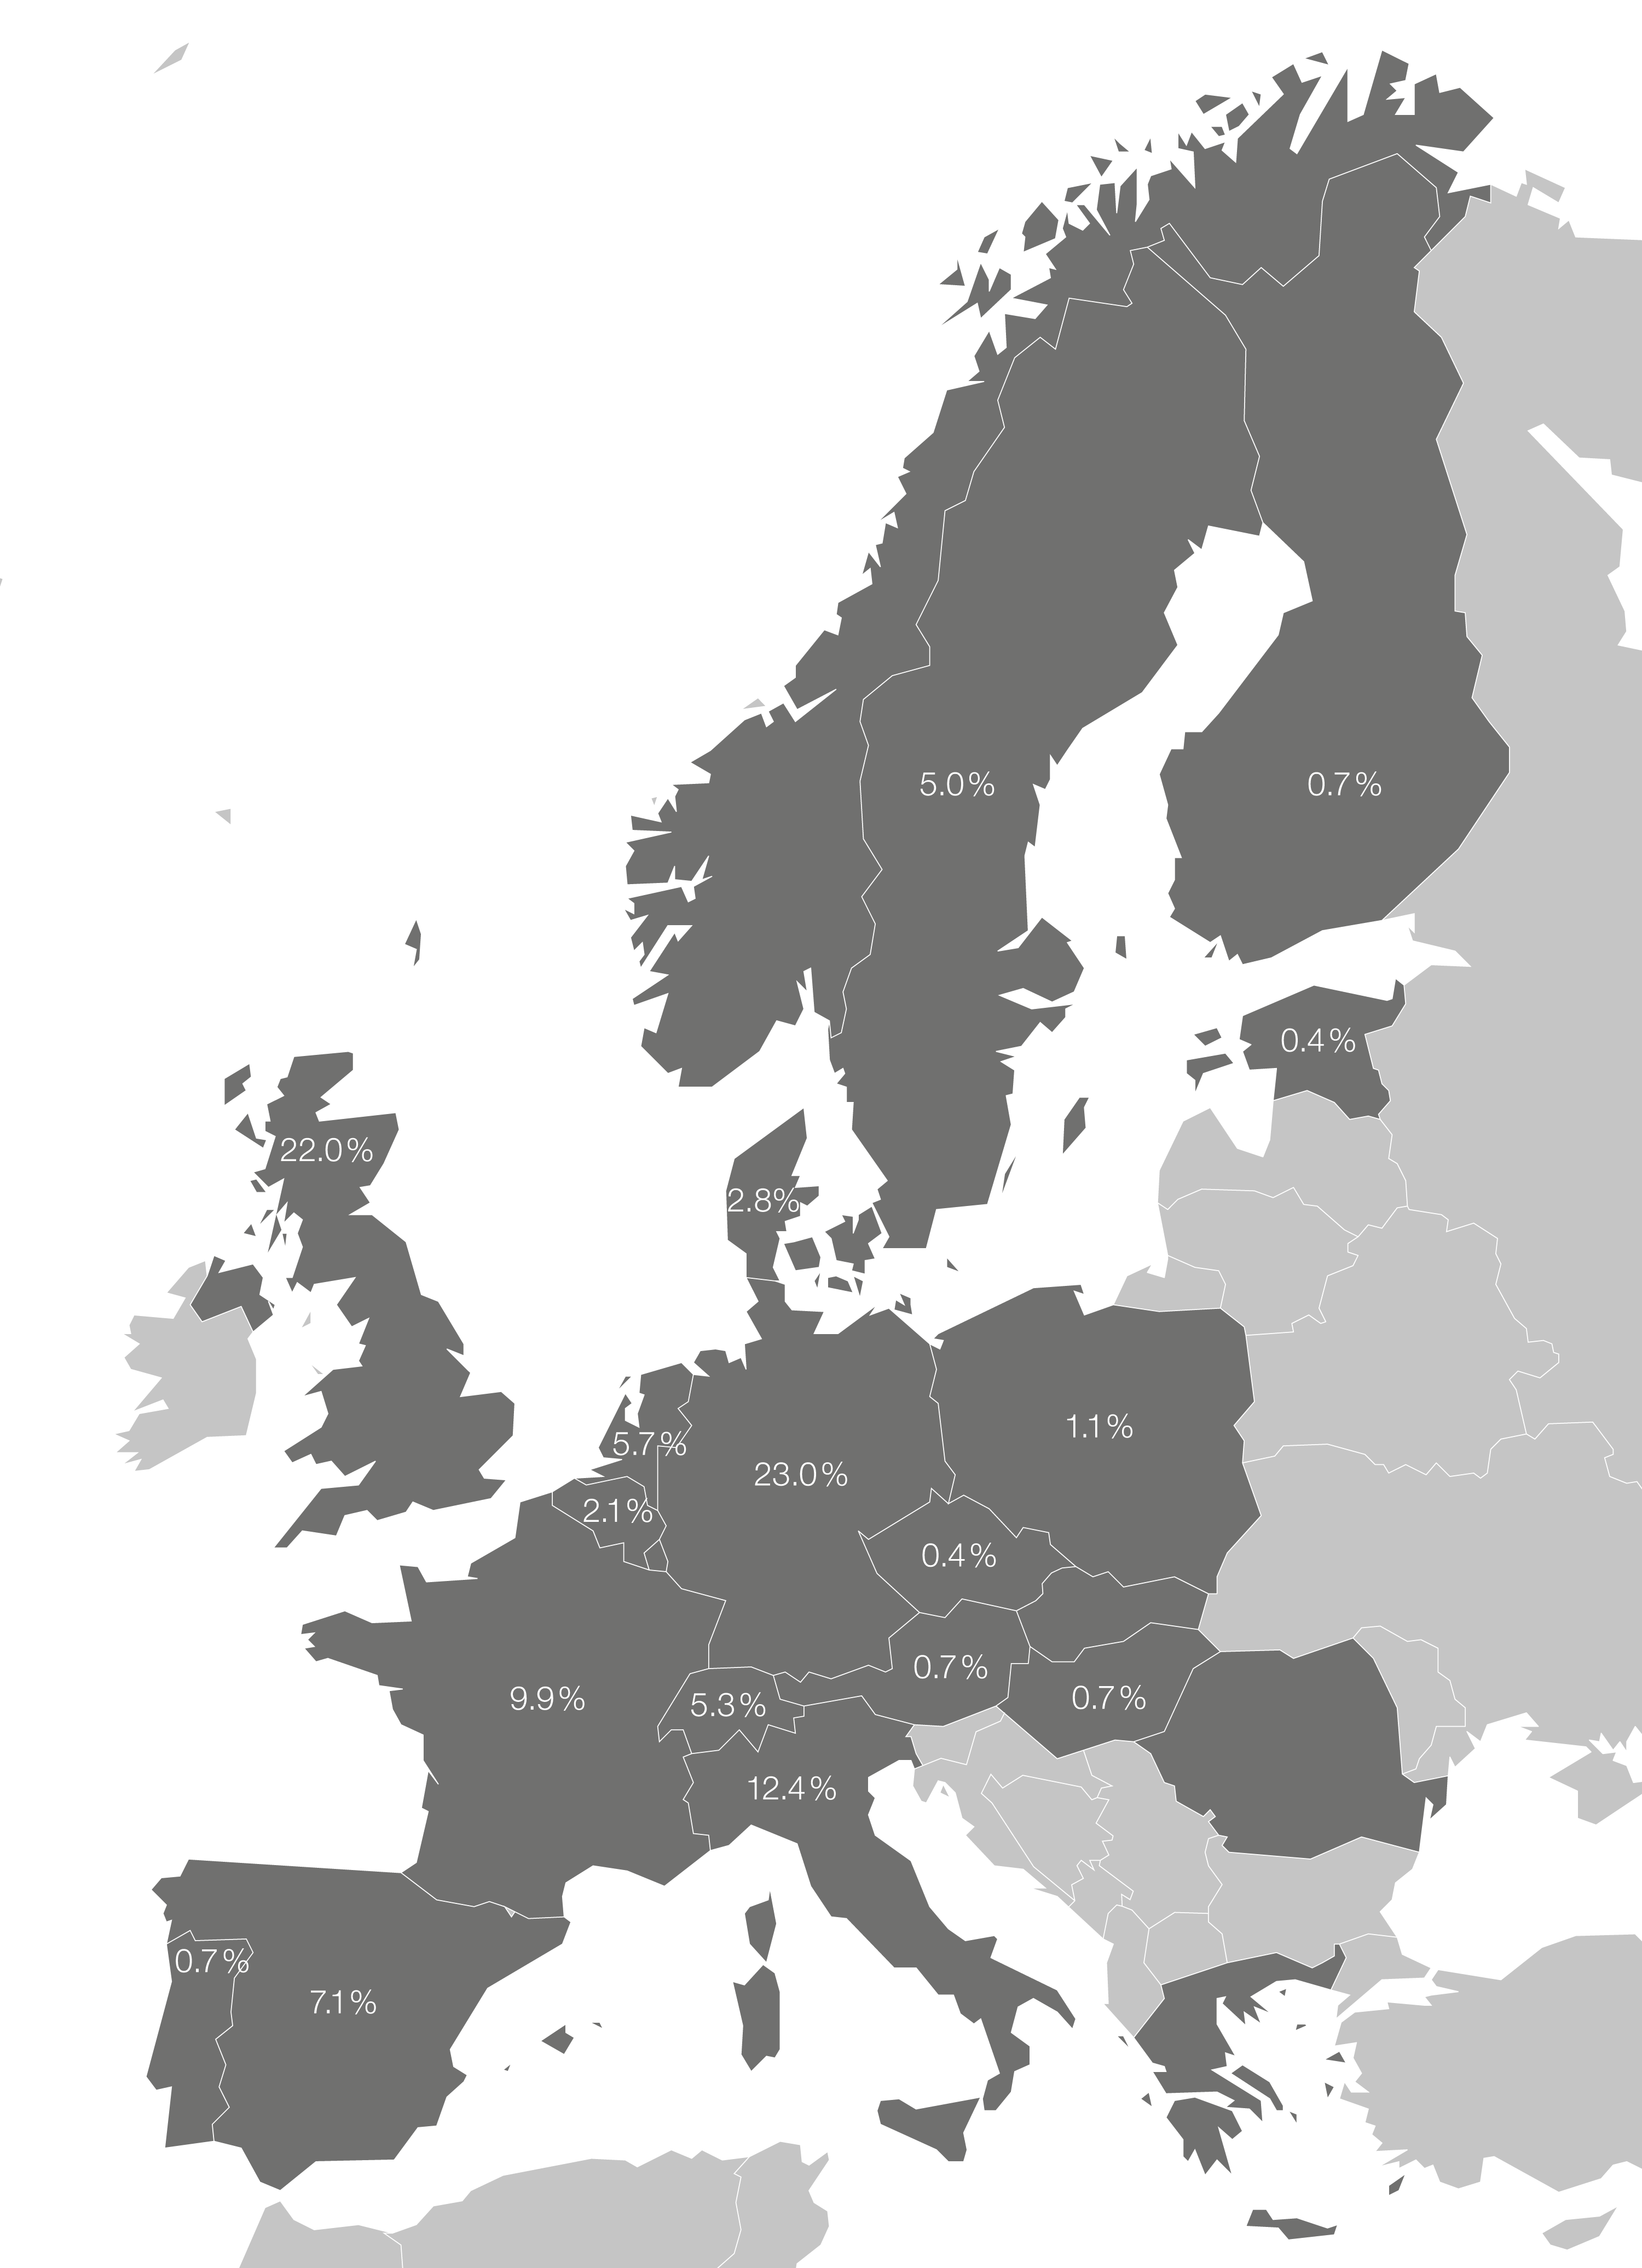

ESA/Hubble publications in 2017

Hubble data was used in 743 peer reviewed papers published in 2017, as of 4 December. Out of these, 282 (38%) had an astronomer from an ESA Member State as the main author. This map shows the percentage distribution of published papers within the ESA Member States.

The ESA affiliation is based on the first author only. ESA affiliation is also only counted for the primary ESA country affiliated with the first author, i.e. if an author is affiliated with Italy and the United Kingdom, only Italy is attributed with the publication. Likewise, if an author is affiliated with China and France, France is attributed with the publication and counted in the ESA metrics.

Credit: ESA/Hubble